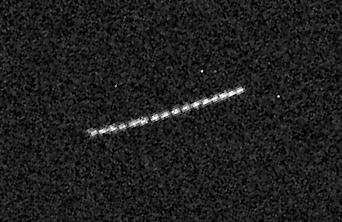

16 Snapshots of Quaoar

This image is a composite of 16 snapshots of the object as it traveled across the sky. Quaoar is in a circular orbit around the Sun. The snapshots were taken over a 29- minute span on July 5.

Credit: NASA/ESA and M. Brown (Caltech)